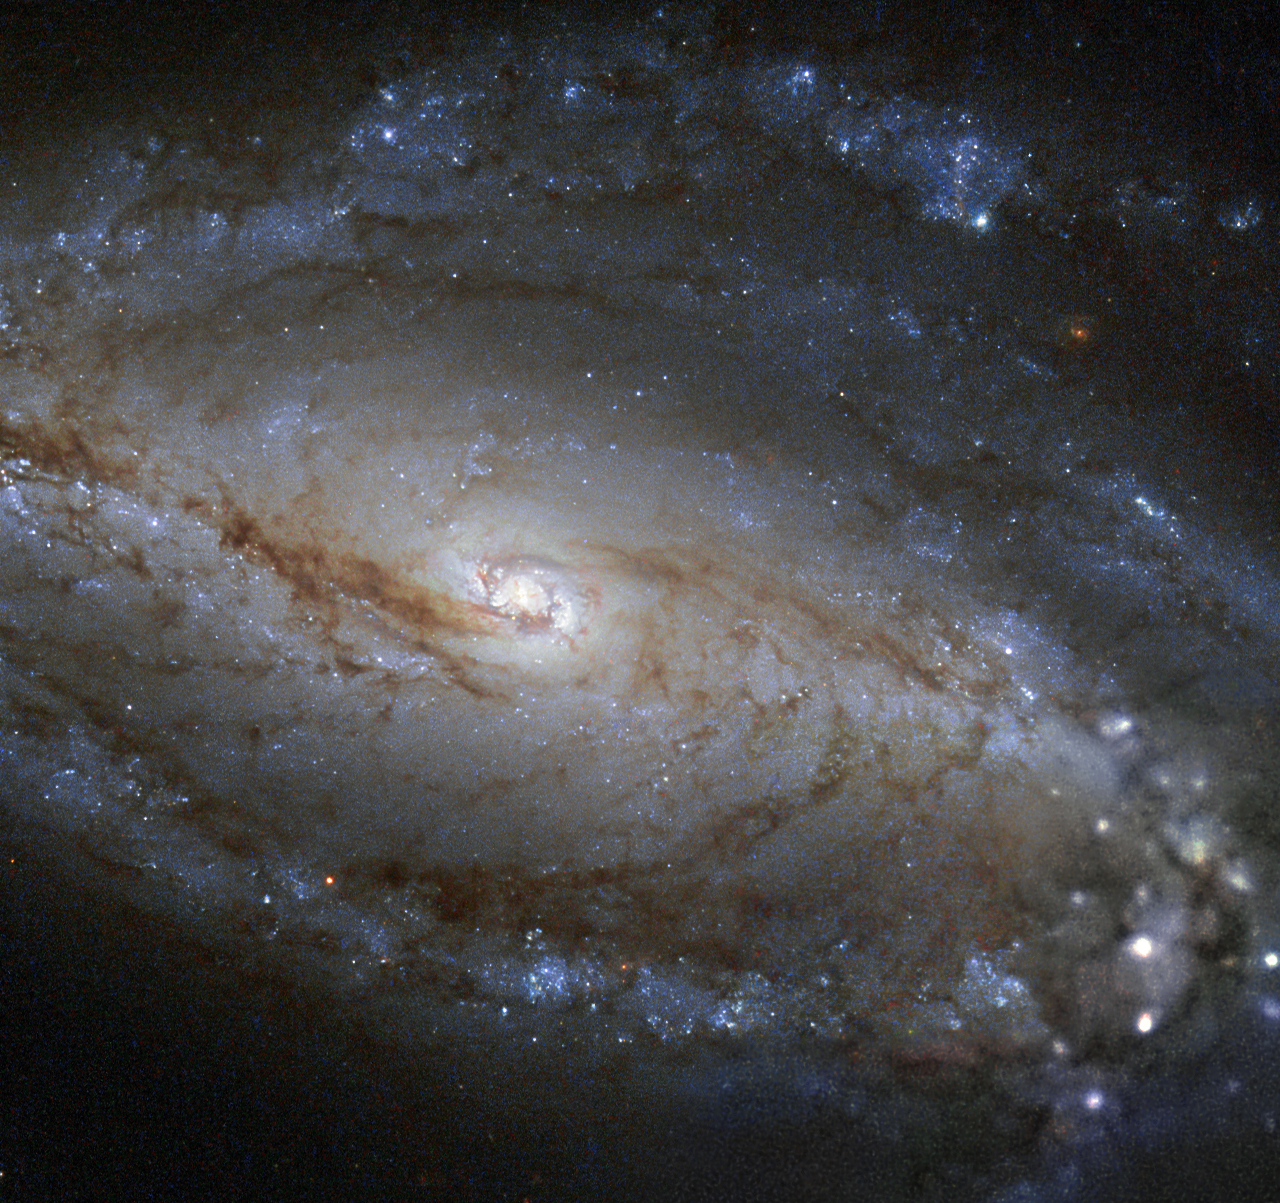

A spiral galaxy’s brights and darks

Ribbons of dust festoon the galaxy NGC 613 in this new image from the NASA/ESA Hubble Space Telescope. NGC 613 is classified as a barred spiral galaxy for the bar-shaped band of stars and dust crossing its intensely glowing centre.

About two thirds of spiral galaxies show a characteristic bar shape like NGC 613 — our own galaxy appears to have one of these bars through its midline as well.

NGC 613 lies 65 million light-years away in the constellation of Sculptor (The Sculptor). It was first noted by the English astronomer William Herschel in 1798 and later by John Louis Emil Dreyer, a Danish–Irish astronomer, who recorded the object in his 1888 New General Catalogue of Nebulae and Clusters of Stars — hence the letters "NGC".

NGC 613's core looks bright and uniformly white in this image as a result of the combined light shining from the high concentration of stars packed into the core, but lurking at the centre of this brilliance lies a dark secret. As with nearly all spiral galaxies, a monstrous black hole resides at the heart of NGC 613. Its mass is estimated at about ten times that of the Milky Way's supermassive black hole and it is consuming stars, gas and dust. As this matter descends into the black hole's maw it radiates away energy and spews out radio waves. However, when looking at the the galaxy in the optical and infrared wavelengths used to take this image, there is no trace of the dark heart.

A version of this image was entered into the Hubble's Hidden Treasures image processing competition by contestant Robert Gendler.

Credit: ESA/Hubble & NASA and S. Smartt (Queen's University Belfast) Acknowledgement: Robert Gendler